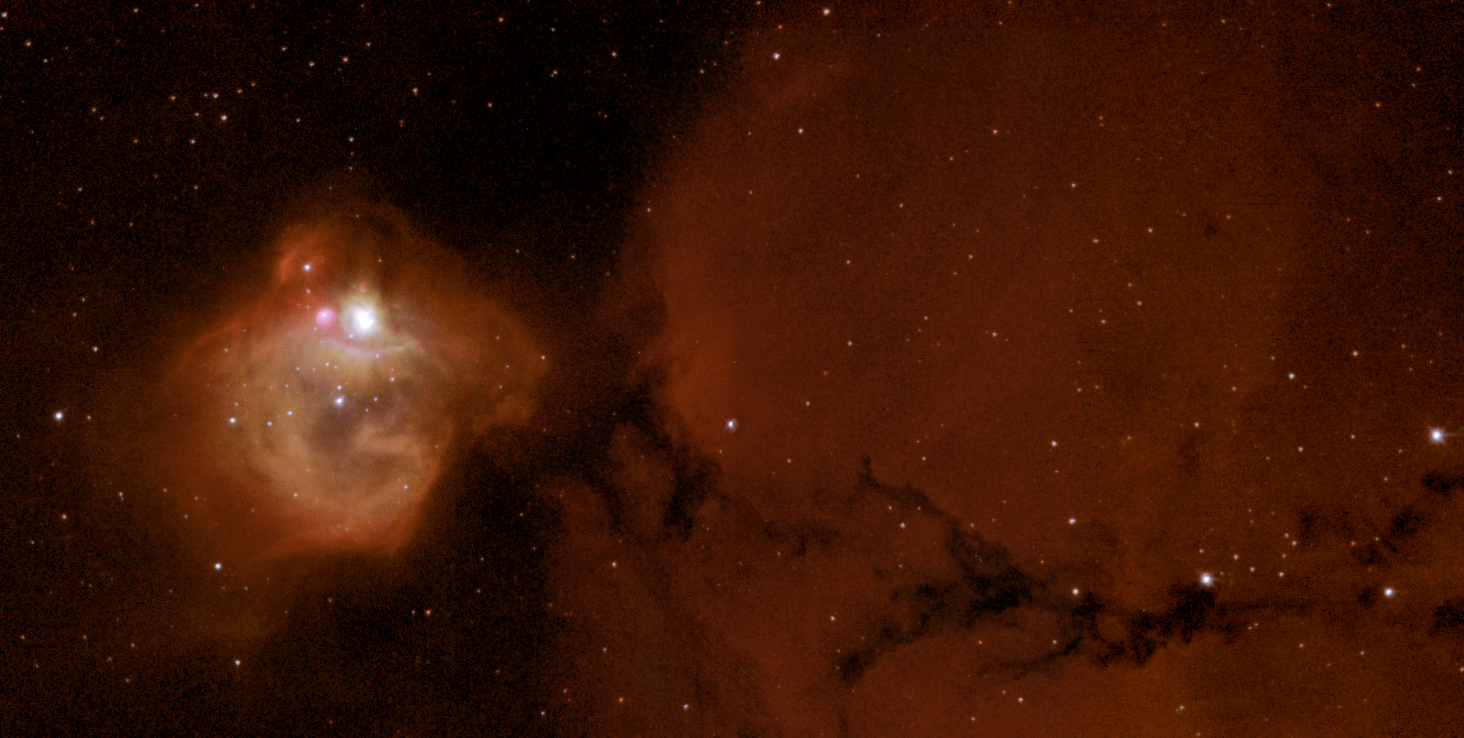

N83B - massive infant stars rock their cradle

Extremely intense radiation from newly born, ultra-bright stars has blown a glowing spherical bubble in the nebula N83B, also known as NGC 1748. A new NASA/ESA Hubble Space Telescope image has helped to decipher the complex interplay of gas and radiation of a star-forming region in a nearby galaxy. The image graphically illustrates just how these massive stars sculpt their environment by generating powerful winds that alter the shape of the parent gaseous nebula. These processes are also seen in our Milky Way in regions like the Orion Nebula.

The Hubble telescope is famous for its contribution to our knowledge about star formation in very distant galaxies. Although most of the stars in the Universe were born several billions of years ago, when the Universe was young, star formation still continues today. This new Hubble image shows a very compact star-forming region in a small part of one of our neighboring galaxies - the Large Magellanic Cloud. This galaxy lies only 165,000 light-years from our Milky Way and can easily be seen with the naked eye from the Southern Hemisphere.

Credit: ESA, NASA & Mohammad Heydari-Malayeri (Observatoire de Paris, France)